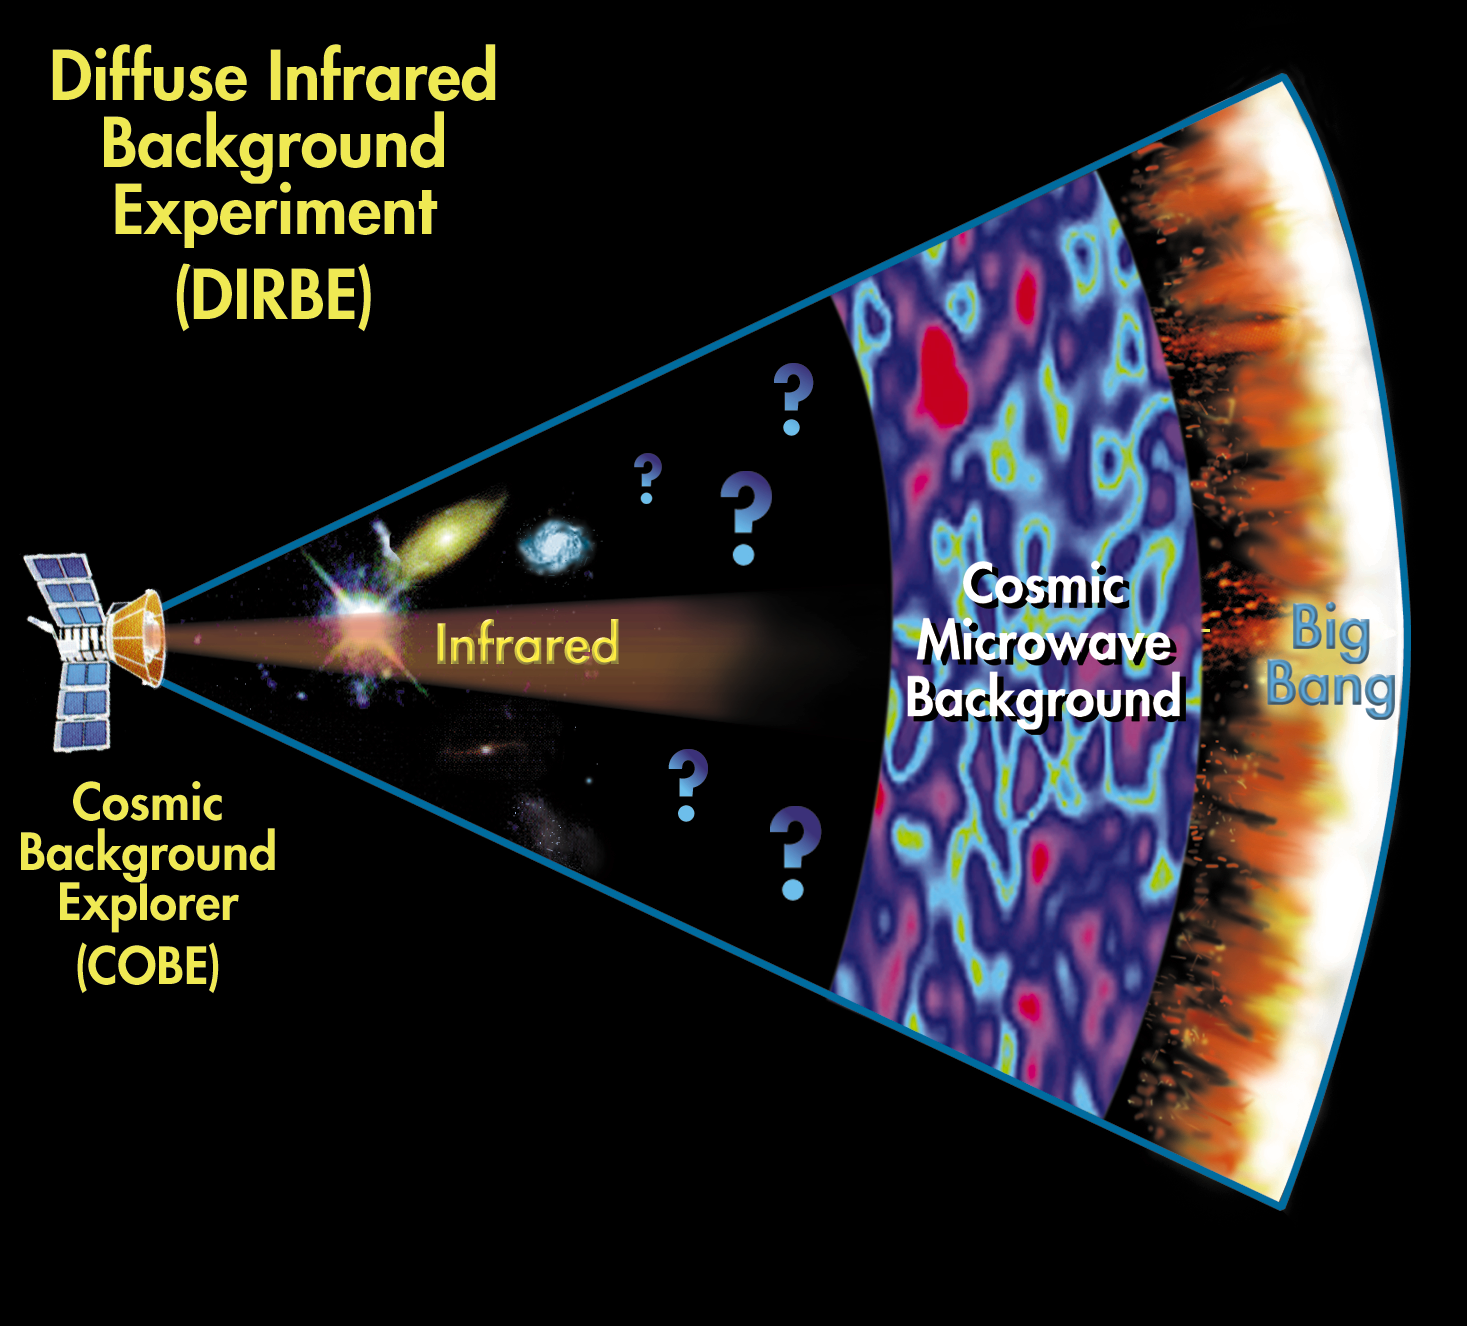

Diagram illustrating the relative distances involved with the detection.

NASA conducted the Diffuse Infrared Background Experiment (DIRBE) using the Cosmic Background Explorer (COBE) from December 1989 to September 1999. The goal of the experiment was a survey of the diffuse infrared sky to get deeper knowledge on the population and evolution of early galaxies.

As the illustration shows we have already know a great detail of the modern universe, as well as of the Cosmic Microwave Background. However we still lack the deeper understanding of the Universe in the time period after the Cosmic Microwave Background.

Credit: NASA & ESA